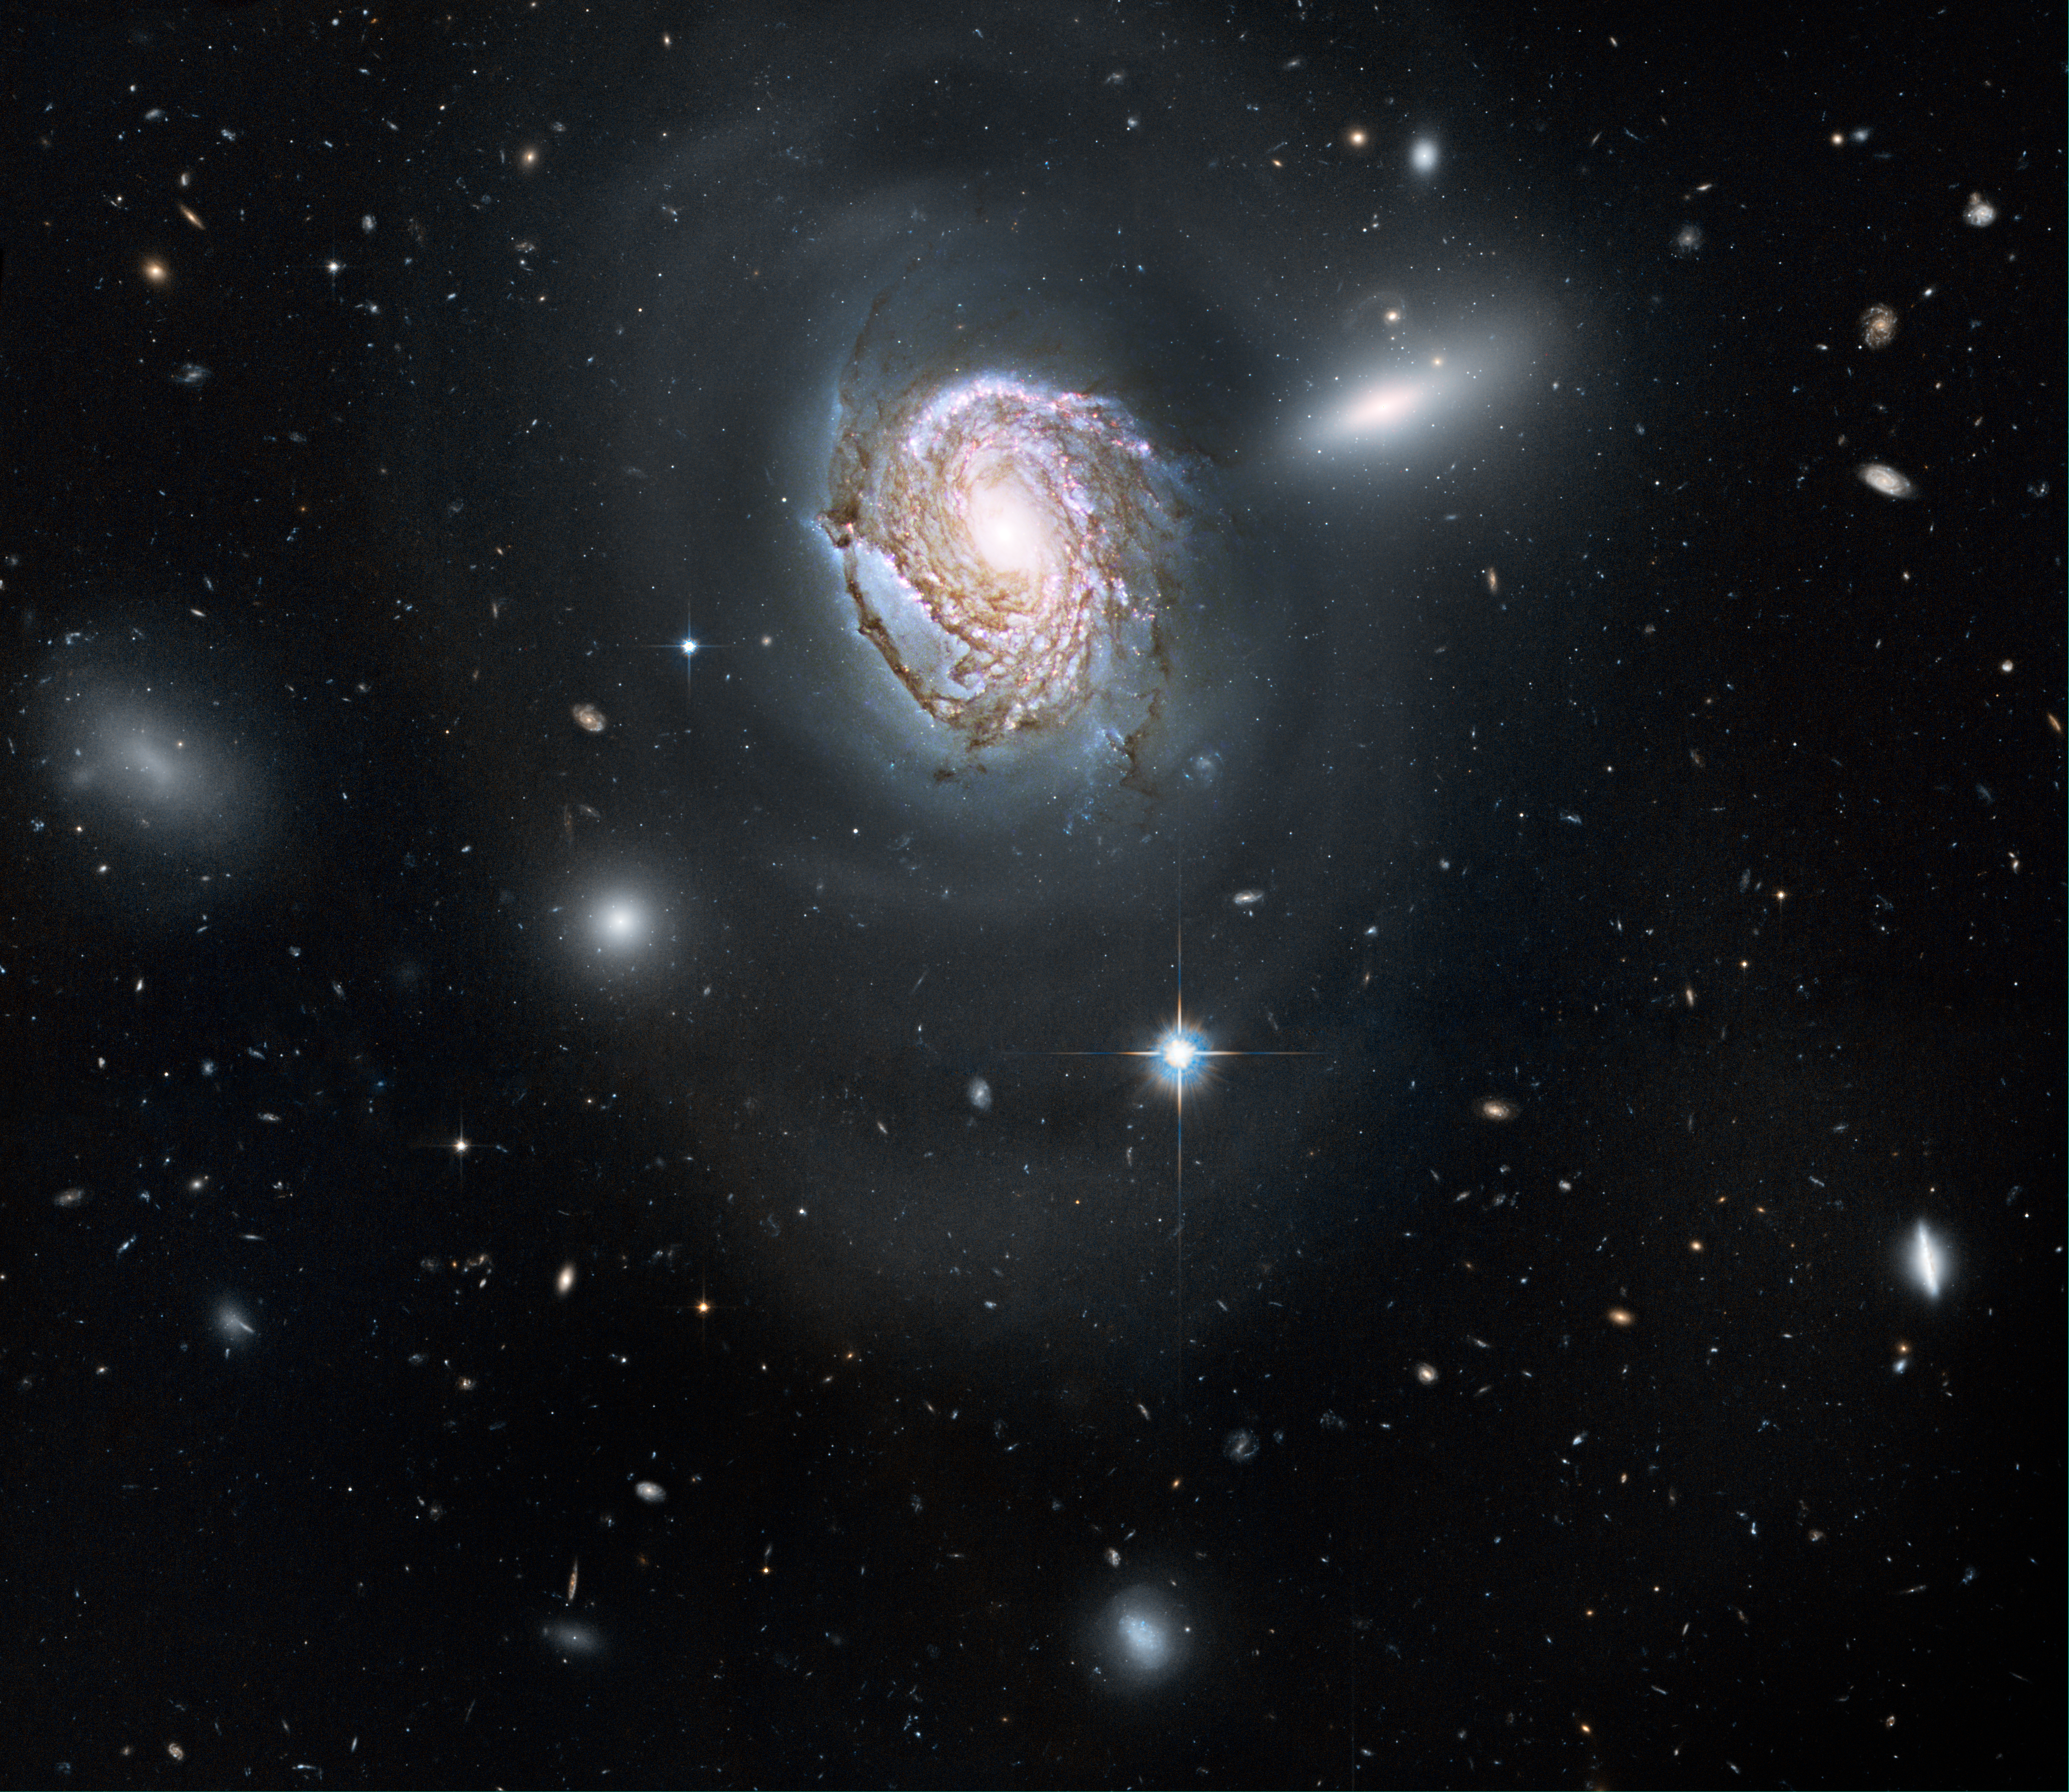

Spiral galaxy NGC 4911 in the Coma cluster

A long-exposure Hubble Space Telescope image shows a majestic face-on spiral galaxy located deep within the Coma Cluster of galaxies, which lies 320 million light-years away in the northern constellation Coma Berenices.

The galaxy, known as NGC 4911, contains rich lanes of dust and gas near its centre. These are silhouetted against glowing newborn star clusters and iridescent pink clouds of hydrogen, the existence of which indicates ongoing star formation. Hubble has also captured the outer spiral arms of NGC 4911, along with thousands of other galaxies of varying sizes. The high resolution of Hubble's cameras, paired with considerably long exposures, made it possible to observe these faint details.

NGC 4911 and other spirals near the centre of the cluster are being transformed by the gravitational tug of their neighbours. In the case of NGC 4911, wispy arcs of the galaxy's outer spiral arms are being pulled and distorted by forces from a companion galaxy (NGC 4911A), to the upper right. The resultant stripped material will eventually be dispersed throughout the core of the Coma Cluster, where it will fuel the intergalactic populations of stars and star clusters.

The Coma Cluster is home to almost 1,000 galaxies, making it one of the densest collections of galaxies in the nearby universe. It continues to transform galaxies at the present epoch, due to the interactions of close-proximity galaxy systems within the dense cluster. Vigorous star formation is triggered in such collisions.

Galaxies in this cluster are so densely packed that they undergo frequent interactions and collisions. When galaxies of nearly equal masses merge, they form elliptical galaxies. Merging is more likely to occur in the center of the cluster where the density of galaxies is higher, giving rise to more elliptical galaxies.

This natural-colour Hubble image, which combines data obtained in 2006, 2007, and 2009 from the Wide Field Planetary Camera 2 and the Advanced Camera for Surveys, required 28 hours of exposure time.

Credit: NASA, ESA, and the Hubble Heritage Team (STScI/AURA). Acknowledgment: K. Cook (Lawrence Livermore National Laboratory, USA)